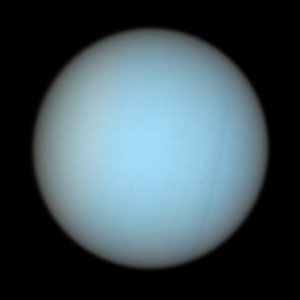

Uranus in Natural Colors

Taken with the Space Telescope Imaging Spectrograph and the Advanced Camera for Surveys aboard NASA's Hubble Space Telescope this image reveals in natural colours Uranus's faint rings and several of its satellites.

Credit: NASA/ESA and Erich Karkoschka, University of Arizona